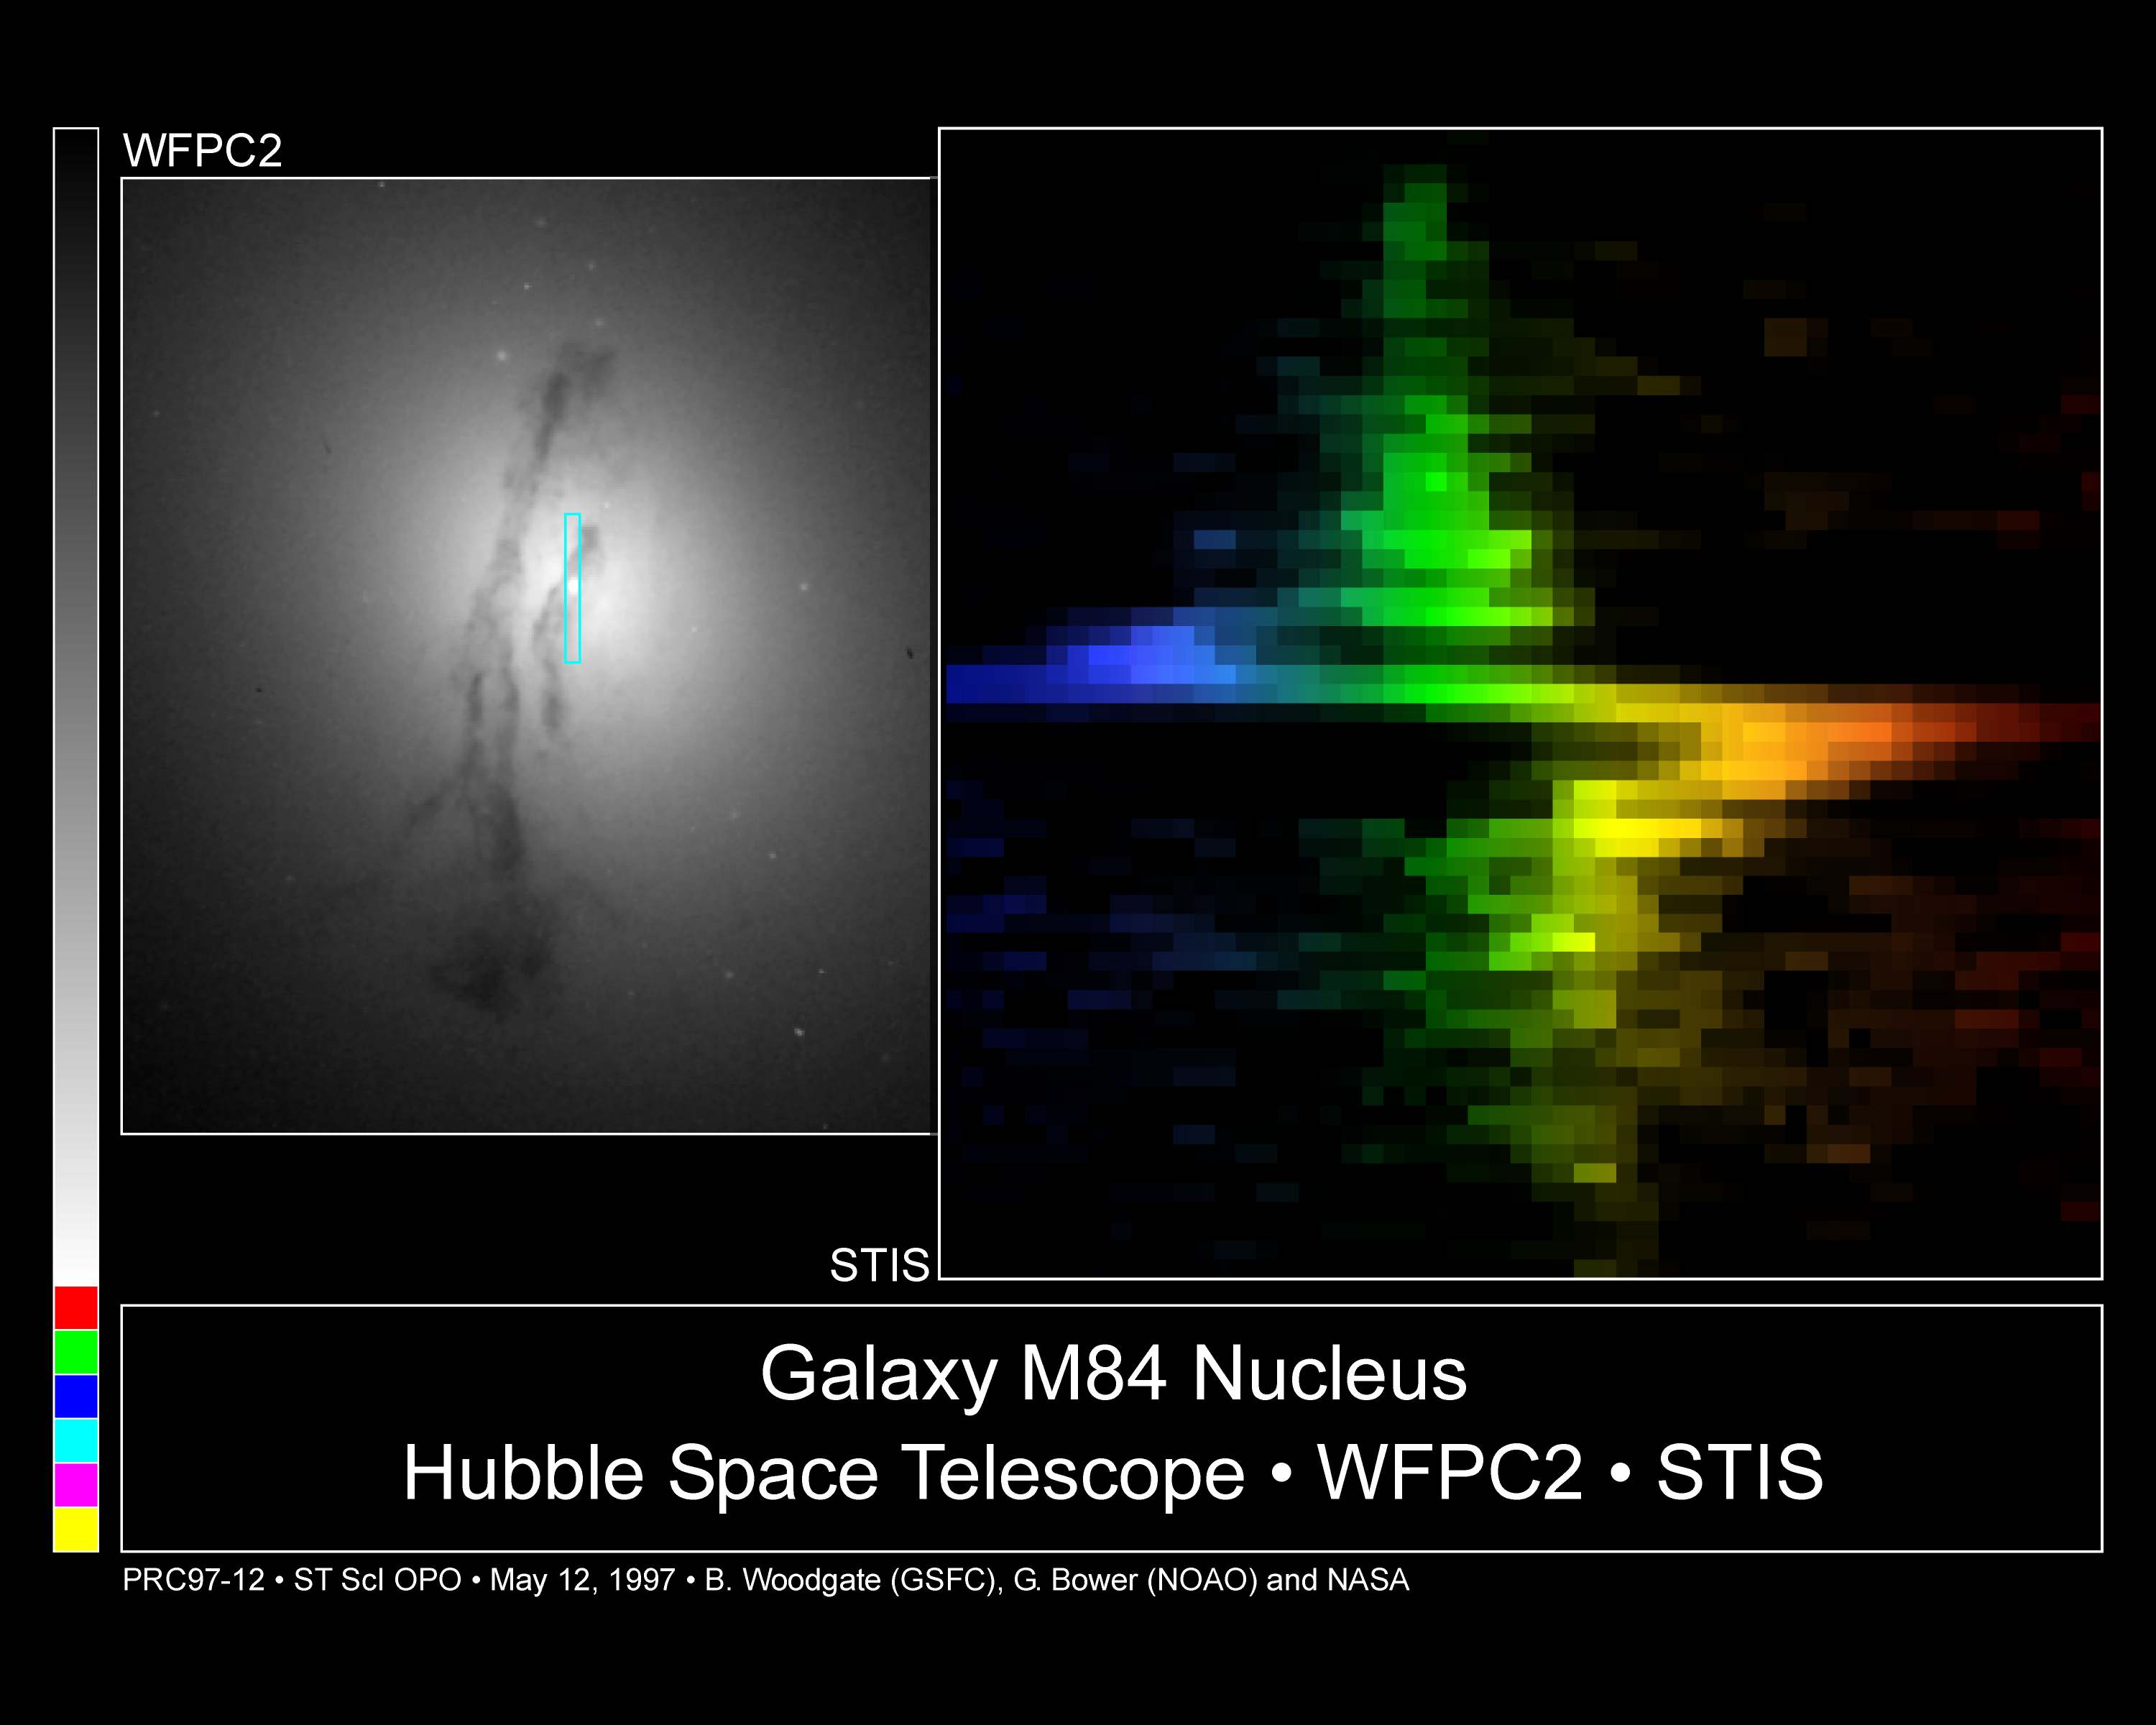

Galaxy M84 nucleus

This observation demonstrates a direct connection between a supermassive black hole and activity (such as radio emission) in the nucleus of an active galaxy. It also shows that STIS is ideally suited for efficiently conducting a survey of galaxies to determine the distribution of the black holes and their masses.

Credit: Gary Bower, Richard Green (NOAO), the STIS Instrument Definition Team, and NASA/ESA